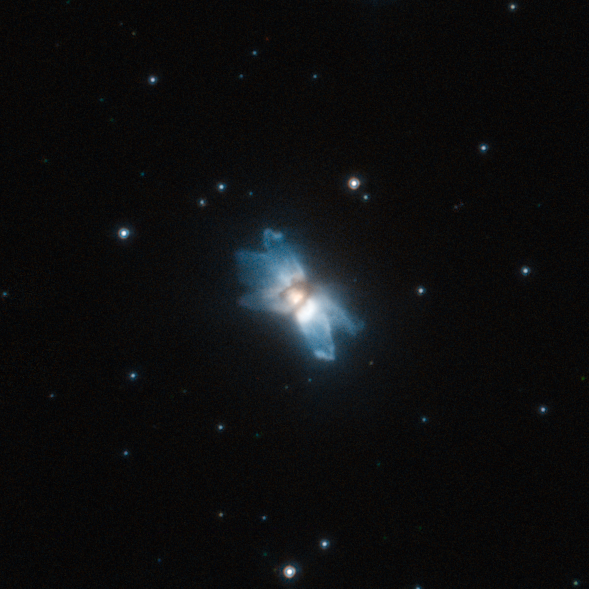

A starfish in the sky

Protoplanetary nebulae offer glimpses of how stars similar to the Sun end their lives and how they make the transition to white dwarfs surrounded by planetary nebulae. As it ages, a Sun-like star eventually sheds its outer layers into space, creating a beautiful and often intricately shaped cloud of gas and dust around it. At first, still relatively cool, the star is unable to ionise this gas, which shines only by reflected and scattered stellar light. Only when the temperature of the star increases enough to ionise this protoplanetary nebula does the pattern of gas and dust become a fully fledged planetary nebula.

Protoplanetary nebulae are relatively rare and short-lived objects that provide astronomers with clues into how the often strangely asymmetric planetary nebulae are formed. Clearly visible in this image are five blue lobes that extend away from the central star and give the nebula its asymmetric starfish shape. While astronomers have come up with theories for the origin of these structures, such as direction-changing jets or explosive ejections of matter from the star, their formation is not entirely understood.

IRAS 19024+0044 is blue in colour as the blue component of the light coming from the star is more easily scattered by the gas and dust in the nebula, while the red and orange rays are relatively unaffected. This is similar to what happens to sunlight in the Earth’s atmosphere, giving the sky its distinctive shade of blue.

This picture was created from images taken with the High Resolution Channel of Hubble’s Advanced Camera for Surveys. It is a composite image created by the combination of exposures taken through a yellow–orange filter (F606W, coloured blue) and a near-infrared filter (F814W, coloured red). The total exposure times were 880 s and 140 s, respectively and the field of view is approximately 13 by 13 arcseconds.

Credit: ESA/Hubble, NASA and R. Sahai